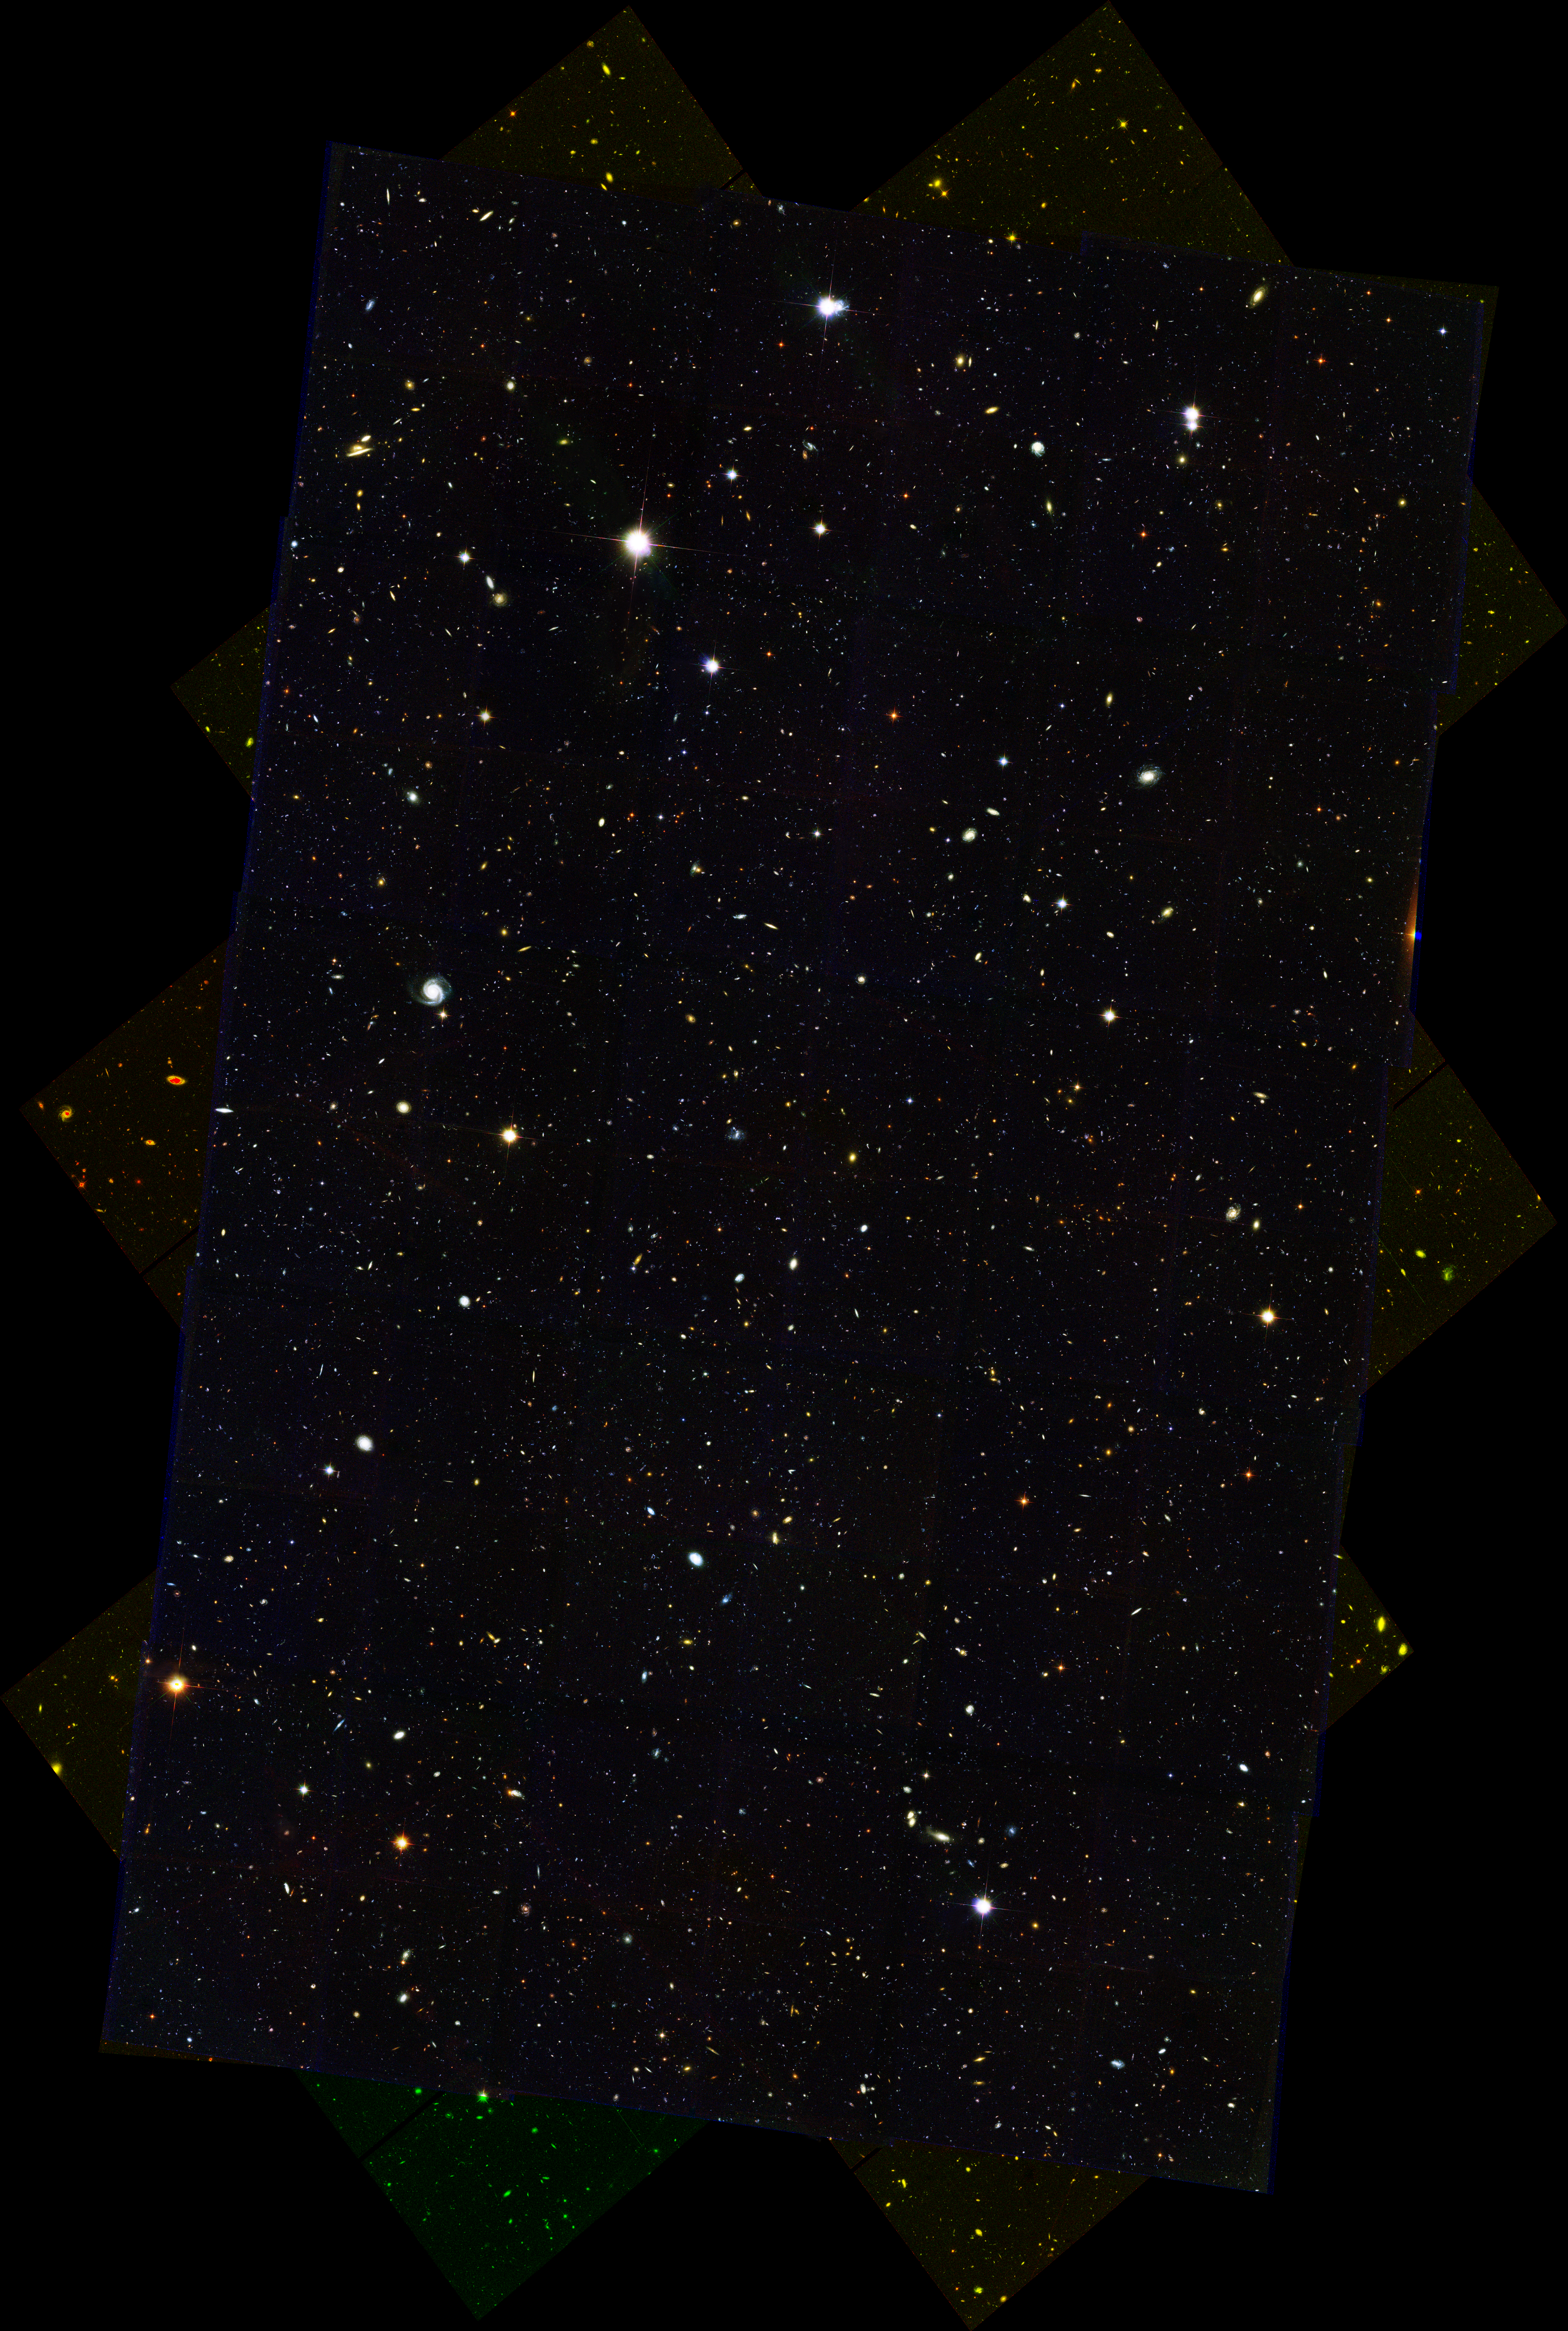

HDF-N HST/ACS/WFC Full Mosaic

Full mosaic of the Hubble Deep Field North.

The full field, consisting of about 25,000 galaxies, is part of a larger survey called the Great Observatories Origins Deep Survey (GOODS), the most ambitious study of the early universe yet undertaken with the Hubble telescope. This survey targeted two representative spots in the sky - one in the Northern Hemisphere and the other in the Southern Hemisphere. This image represents the northern field. The entire GOODS survey reveals roughly 50,000 galaxies. Astronomers have identified more than 2,000 of them as infant galaxies, observed when the universe was less than about 2 billion years old.

Credit: NASA, ESA, the GOODS Team and M. Giavalisco (STScI)